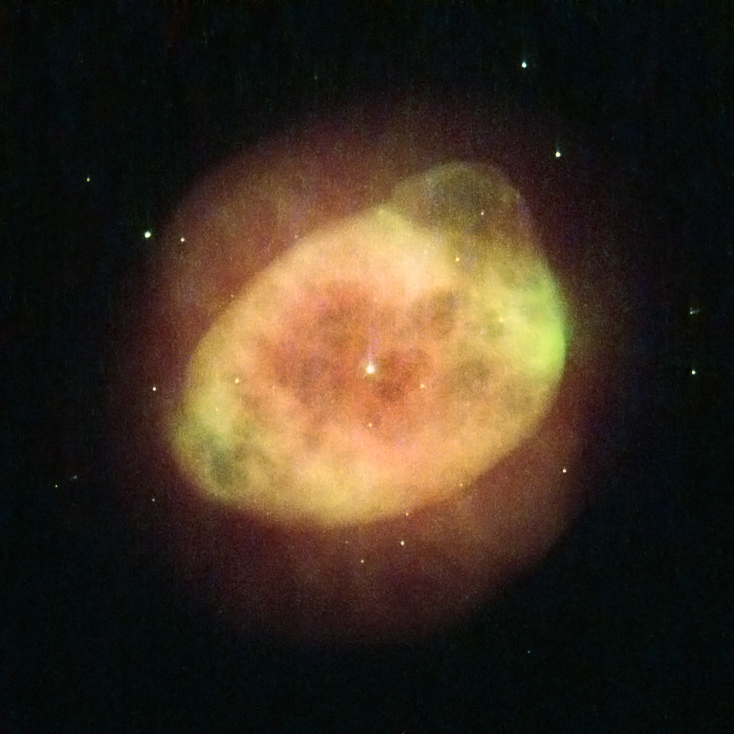

Stars that go out with a whimper

This NASA/ESA Hubble Space Telescope image shows the planetary nebula IC 289, located in the northern constellation of Cassiopeia. Formerly a star like our Sun, it is now just a cloud of ionised gas being pushed out into space by the remnants of the star’s core, visible as a small bright dot in the middle of the cloud.

Weirdly enough, planetary nebulae have nothing to do with planets. Early observers, when looking through small telescopes, could only see undefined, smoky forms that looked like gaseous planets — hence the name. The term has stuck even though modern telescopes like Hubble have made it clear that these objects are not planets at all, but the outer layers of dying stars being thrown off into space.

Stars shine as a result of nuclear fusion reactions in their cores, converting hydrogen to helium. All stars are stable, balancing the inward push caused by their gravity with the outwards thrust from the inner fusion reactions in their cores. When all the hydrogen is consumed the equilibrium is broken; the gravitational forces become more powerful than the outward pressure from the fusion process and the core starts to collapse, heating up as it does so.

When the hot, shrinking core gets hot enough, the helium nuclei begin to fuse into carbon and oxygen and the collapse stops. However, this helium-burning phase is highly unstable and huge pulsations build up, eventually becoming large enough to blow the whole star’s atmosphere away.

A version of this image was entered into the Hubble’s Hidden Treasures image processing competition by contestant Serge Meunier.

Credit: ESA/Hubble & NASA Acknowledgement: Serge Meunier